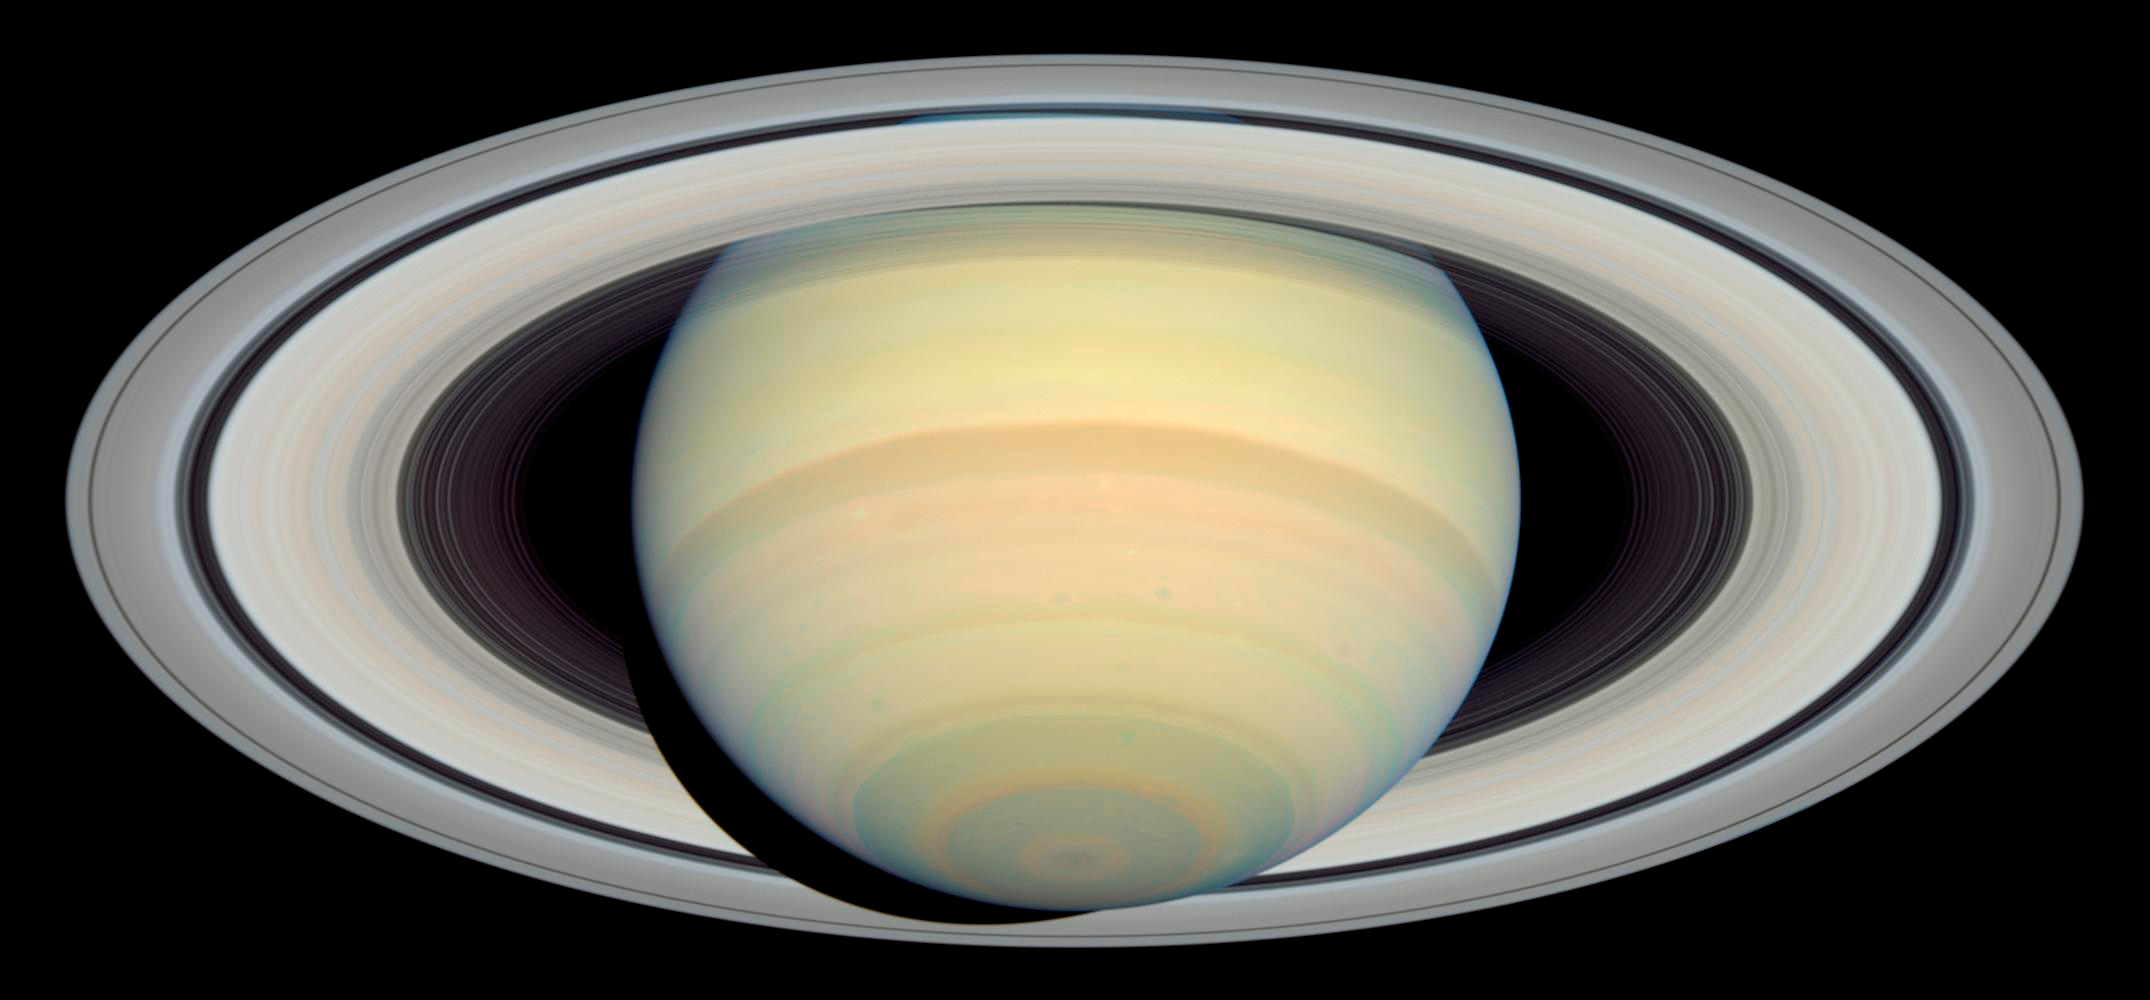

Hubble's Latest Saturn Picture Precedes Cassini's Arrival

As NASA's Cassini spacecraft hurtles toward a July 1, 2004 rendezvous with Saturn, the Hubble Space Telescope continues snapping breathtaking pictures of the solar system's most photogenic planet. This latest view, taken on March 22, 2004, is so sharp that many individual ringlets can be seen in Saturn's ring plane.

Though Hubble is nearly a billion miles farther from Saturn than the Cassini probe, Hubble's exquisite optics, coupled with the high resolution of its Advanced Camera for Surveys (ACS), allow it to take pictures of Saturn which are nearly as sharp as Cassini's wide-angle views of the full planet as it begins its approach. Of course, Cassini will ultimately far exceed the resolution of Hubble during its close encounter with Saturn; indeed, Cassini's sharpness began to surpass Hubble's when it approached to within 14 million miles (23 million km) of Saturn this month.

Credit: NASA, ESA and E. Karkoschka (University of Arizona)